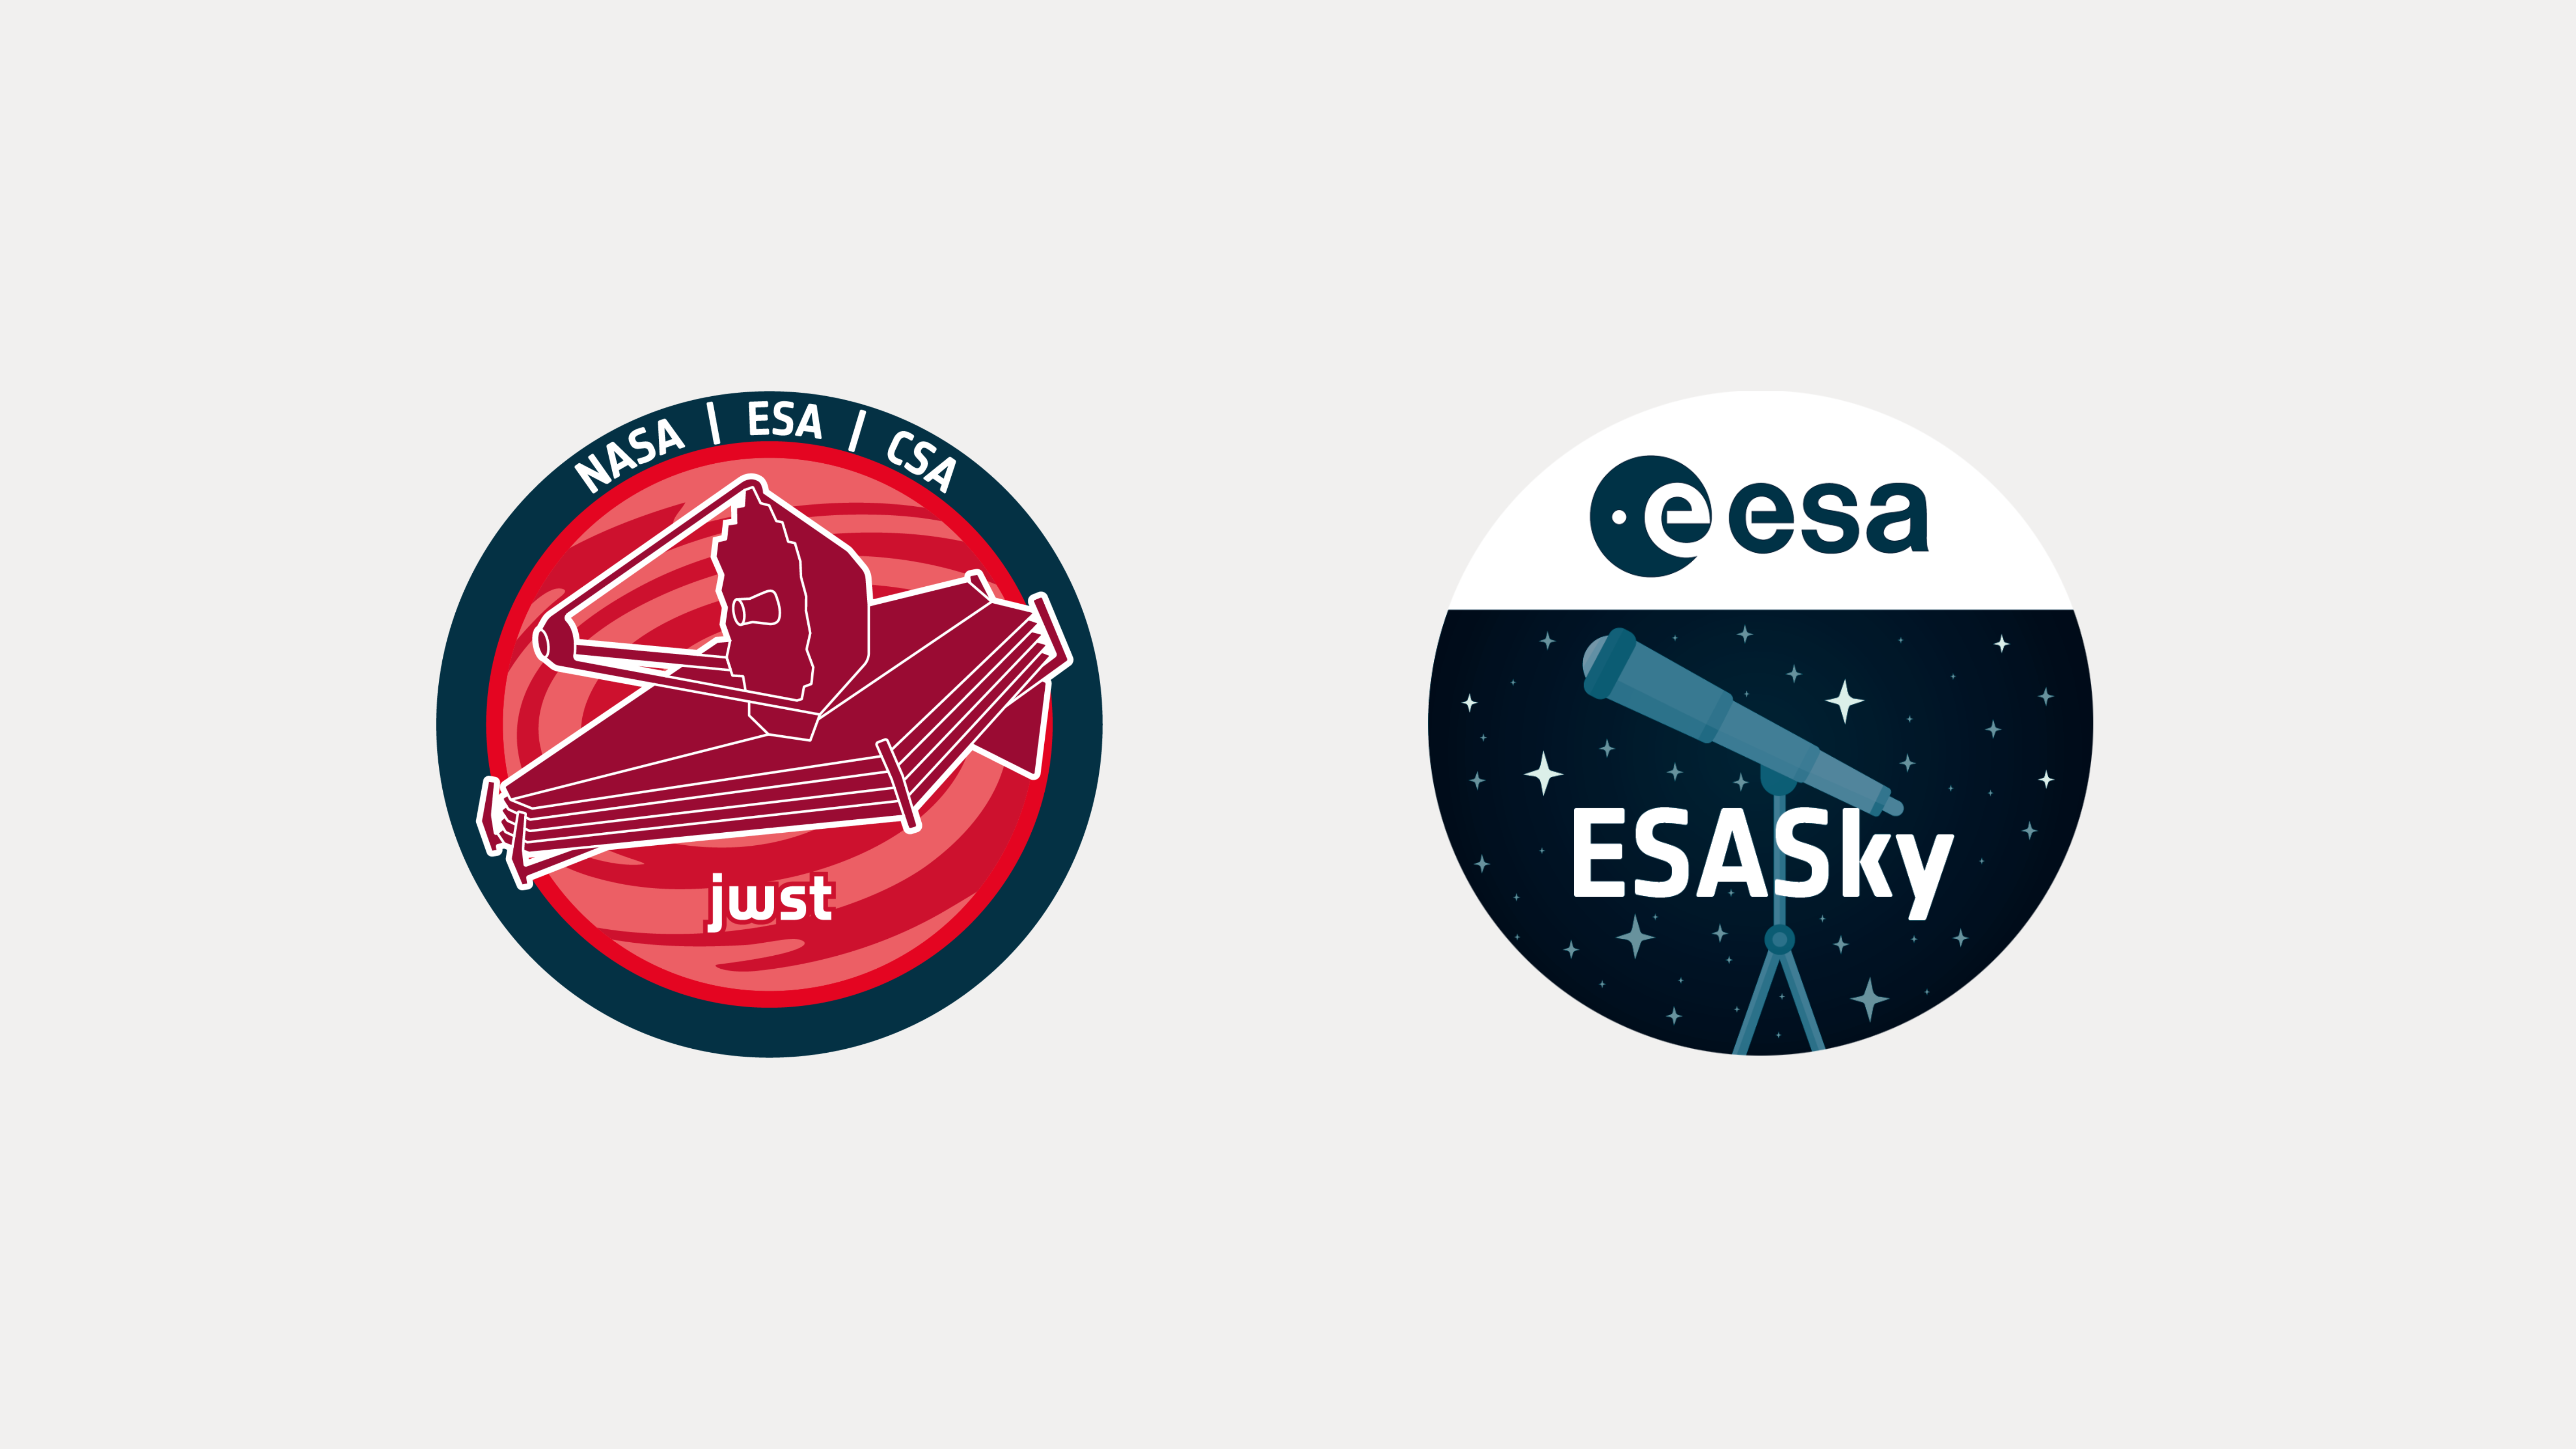

ESASky and ESA/Webb Collaboration

The ESA/Webb and ESASky teams have collaborated to feature the spectacular Webb images featured on the ESA/Webb website in the ESASky application.

Credit: ESASky and ESA/Webb